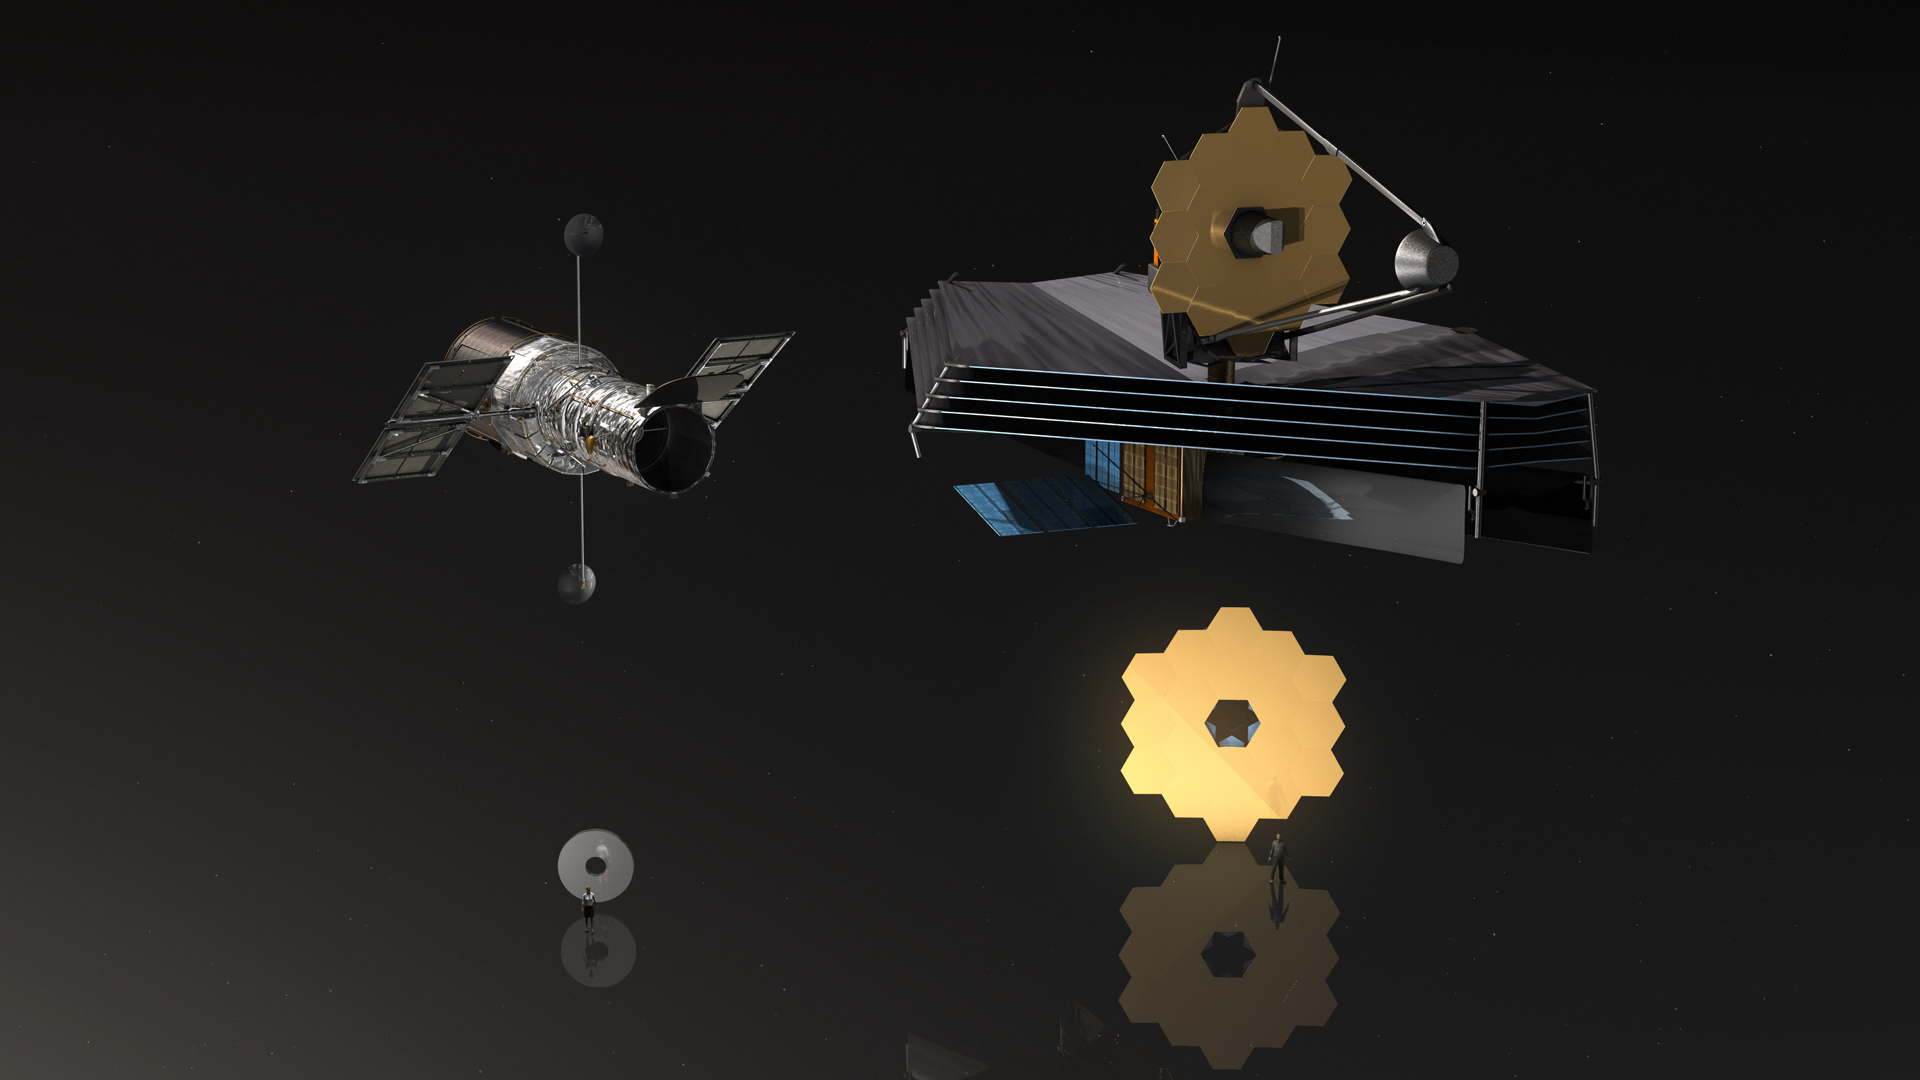

Screenshot of Hubblecast 126

Screenshot of Hubblecast 126: From Ultraviolet to Infrared: Comparing the Hubble and James Webb Space Telescopes

Credit: NASA & ESA